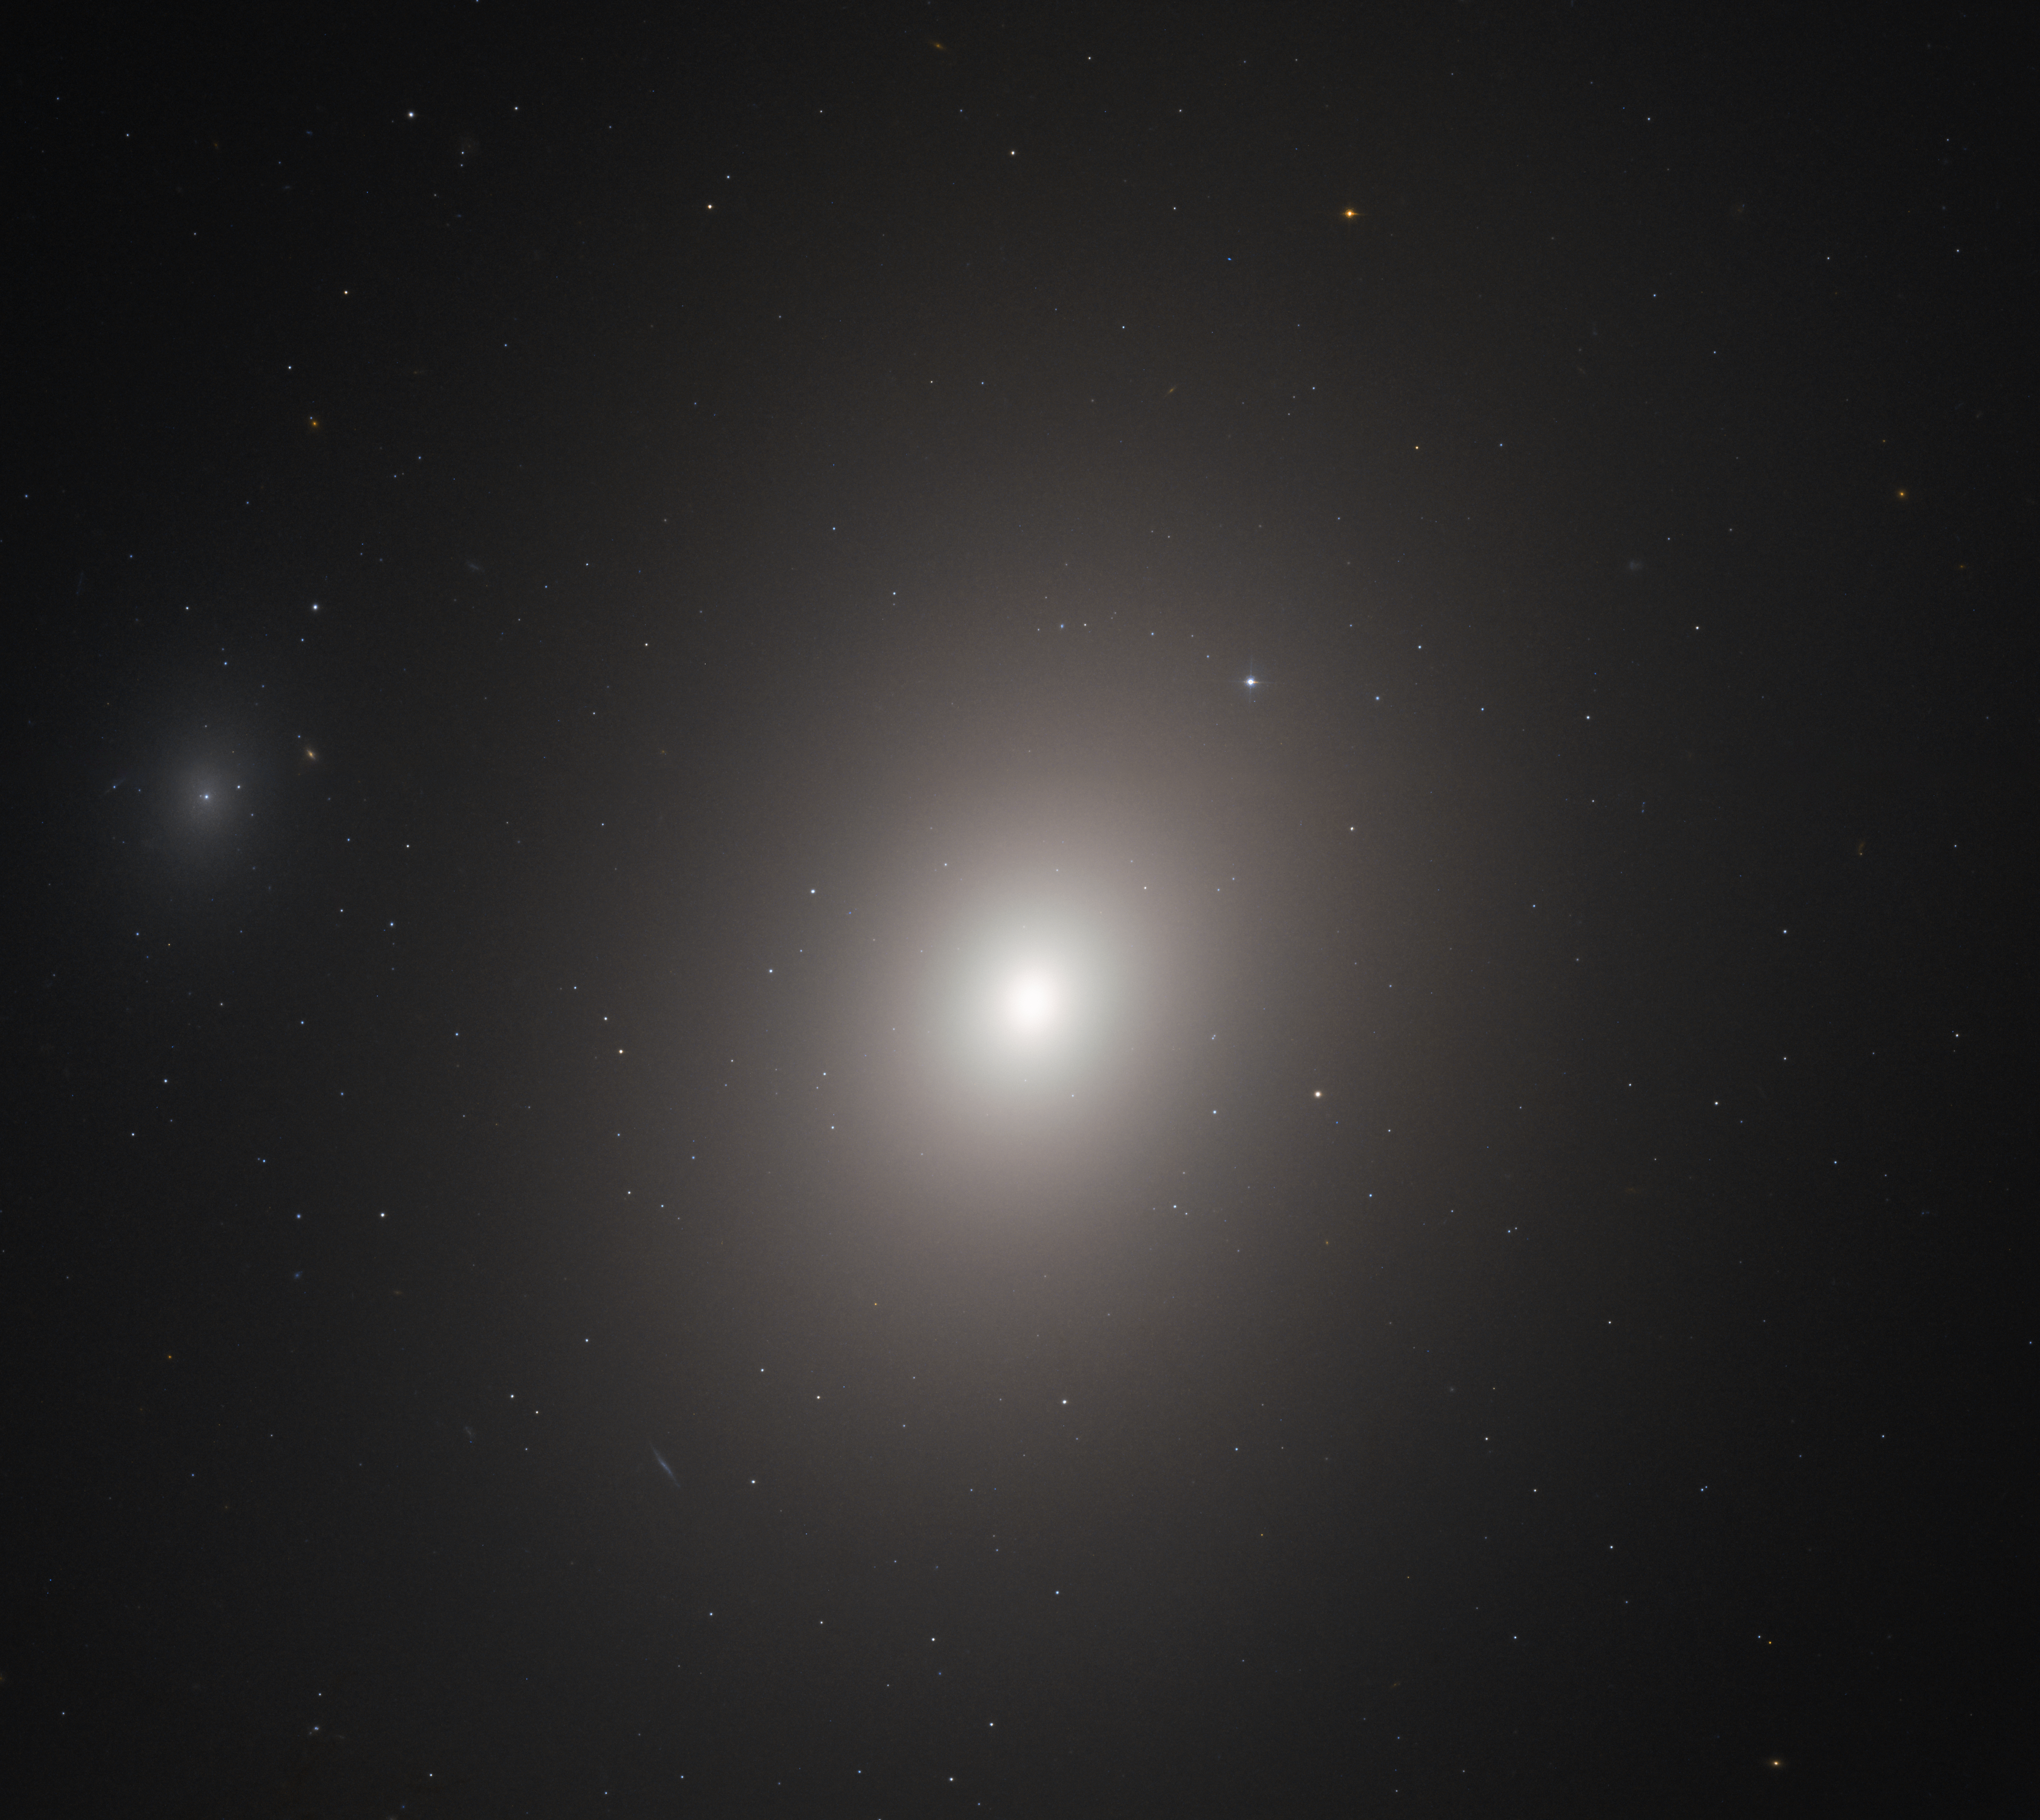

Beacon of Light

This image from the NASA/ESA Hubble Space Telescope shows the galaxy Messier 86. Despite its being discovered over 235 years ago by astronomer Charles Messier, the morphological classification of Messier 86 remains unclear; astronomers are still debating over whether it is either elliptical or lenticular (the latter being a cross between an elliptical and spiral galaxy).

Messier 86 is part of the Virgo Cluster of galaxies and is situated about 50 million light-years from Earth. The galaxy is moving through space remarkably quickly — its current trajectory is bringing it in our direction, back towards the centre of its cluster from the far side, at the incredible speed of over 875 000 kilometres per hour! Because of the speed with which it is moving through the cluster, Messier 86 is undergoing a process known as ram-pressure stripping; the resistive material filling the gaps between individual cluster galaxies is pulling at the gas and dust in Messier 86 and stripping them out as the galaxy moves, creating a long trail of hot gas that is emitting X-ray radiation.

Astronomers are using Hubble observations such as this to study elliptical and lenticular galaxies, both of which are often found at the centres of galaxy clusters. By studying the cores of these galaxies, astronomers hope to determine details of the central structure and to analyse both the history of the galaxy and the formation of its core.

Credit: ESA/Hubble & NASA, P. Cote et al.